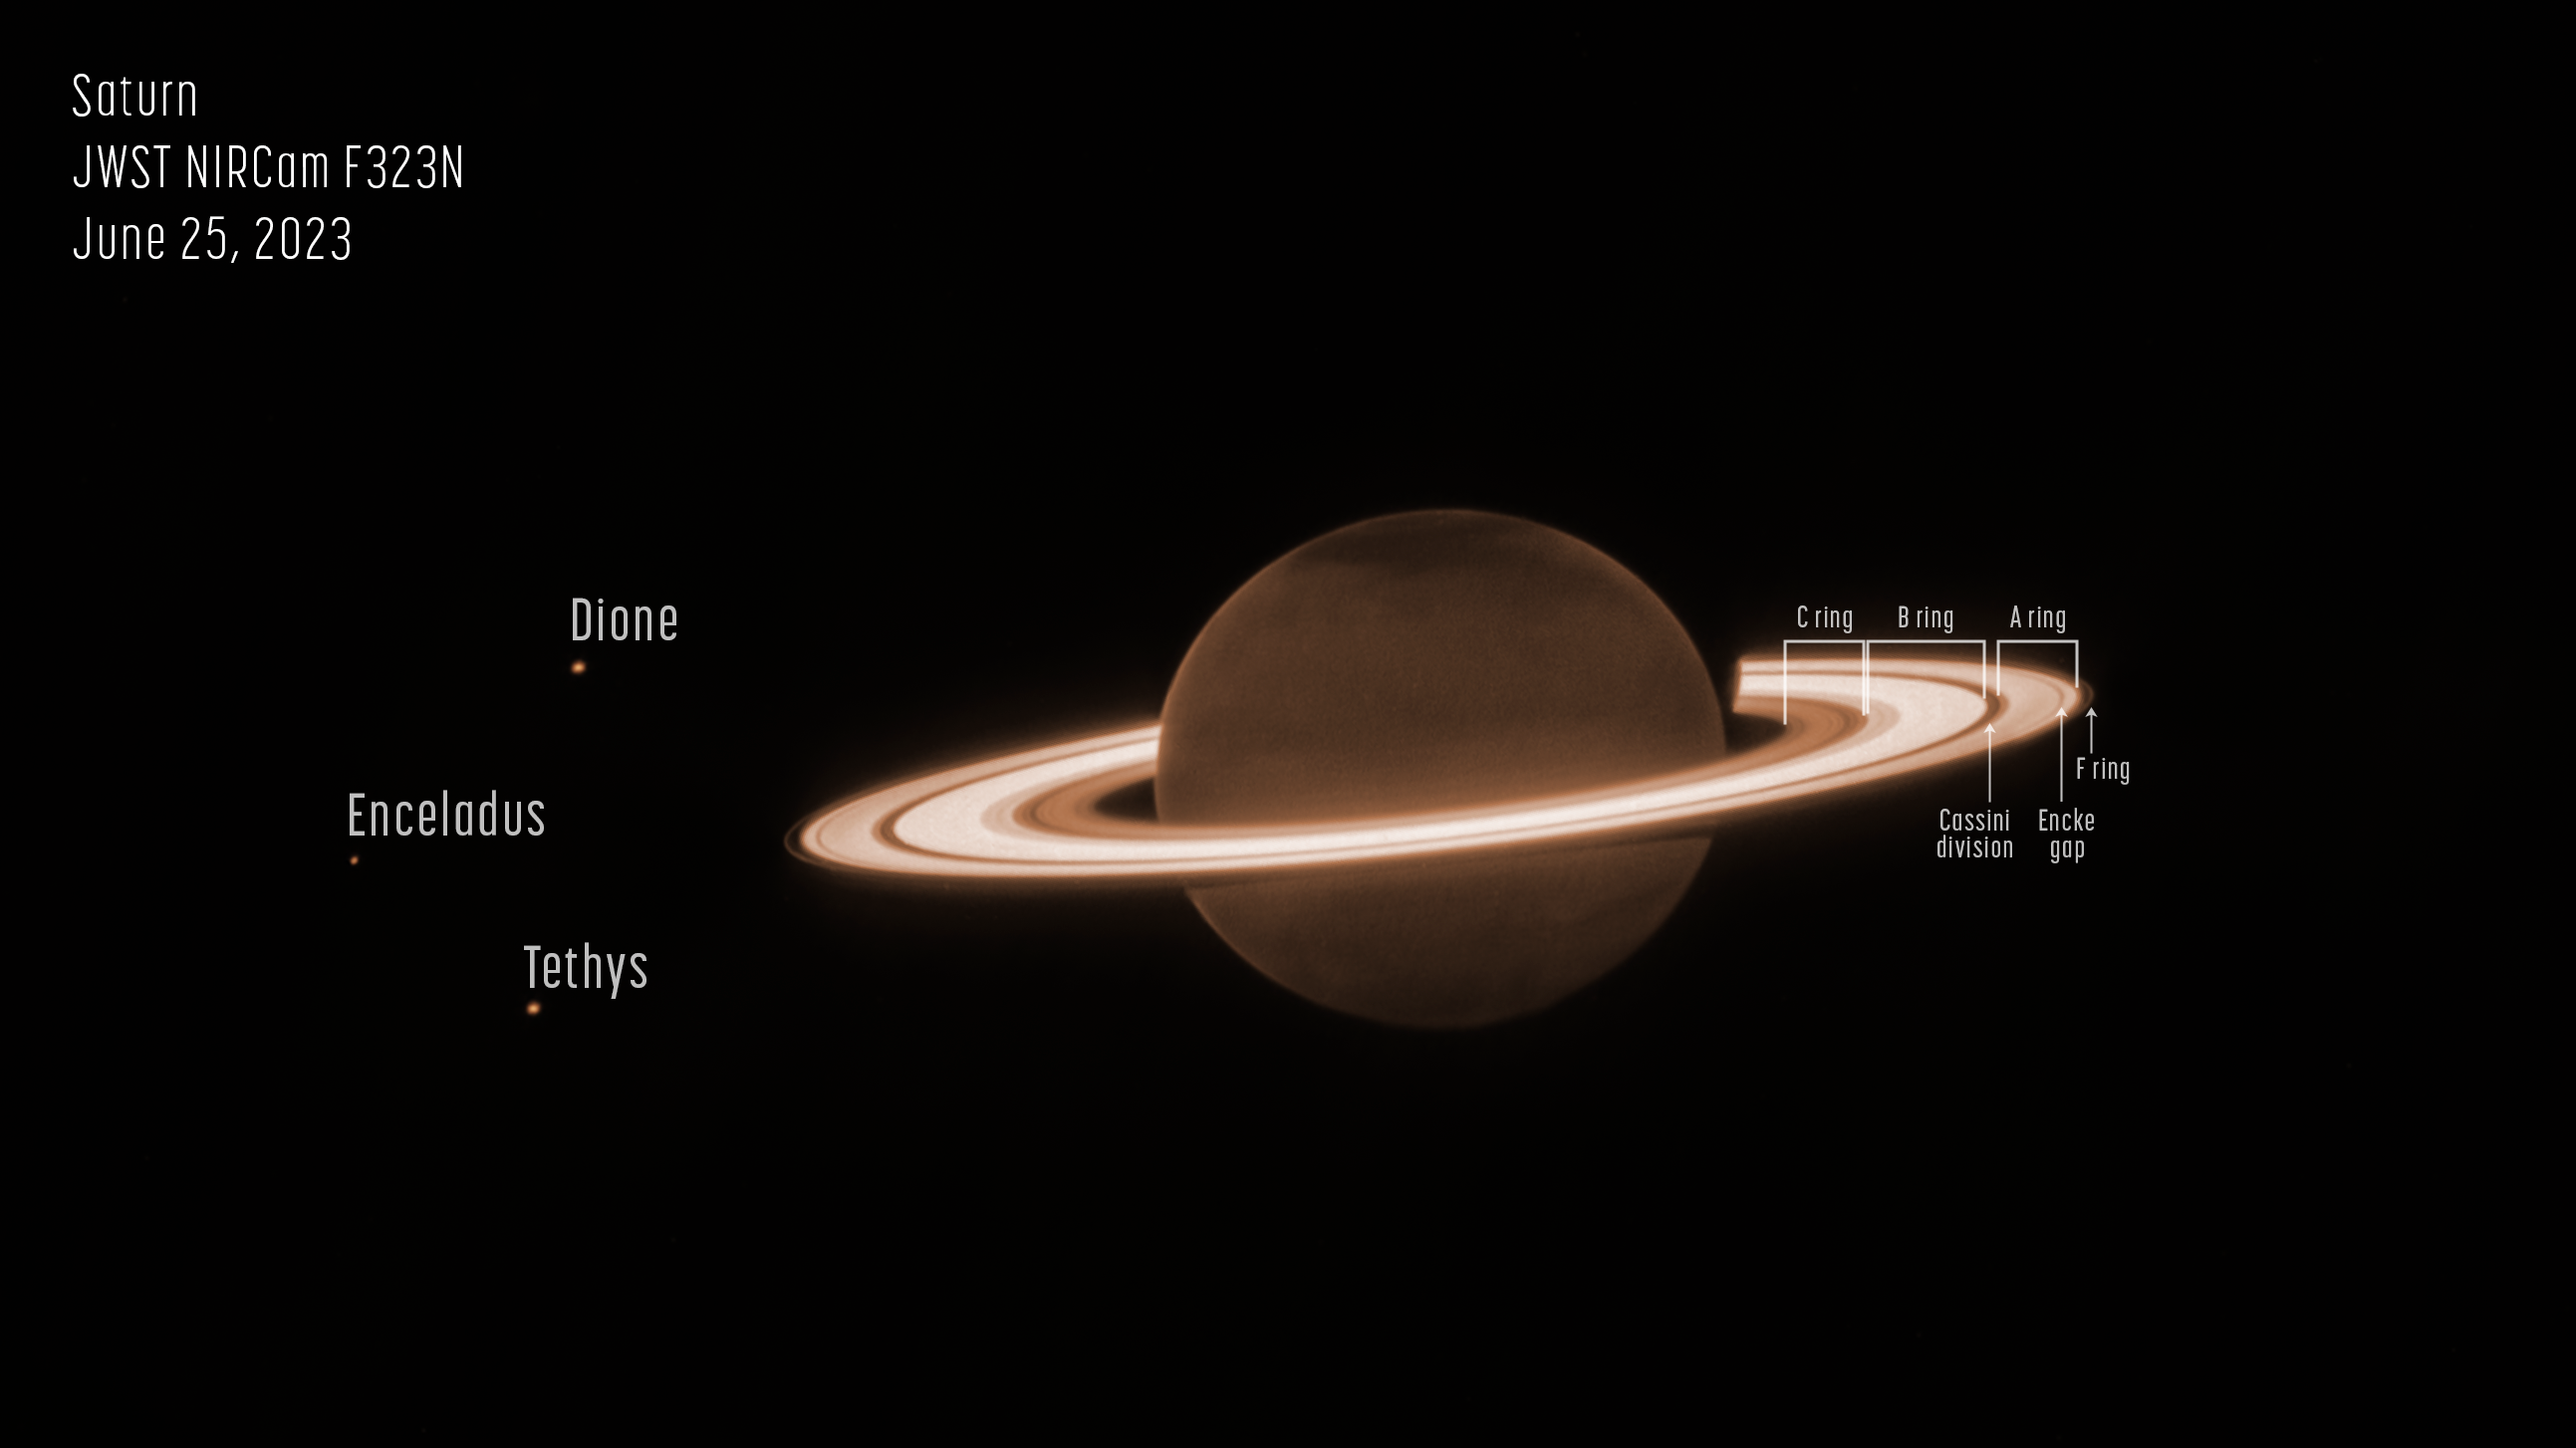

Saturn’s rings shine in Webb’s observations of ringed planet (annotated)

On 25 June 2023, the NASA/ESA/CSA James Webb Space Telescope turned to famed ringed world Saturn for its first near-infrared observations of the planet. The initial imagery from Webb’s NIRCam (Near-Infrared Camera) is already fascinating researchers.

Saturn itself appears extremely dark at this infrared wavelength observed by the telescope, as methane gas absorbs almost all of the sunlight falling on the atmosphere. However, the icy rings stay relatively bright, leading to the unusual appearance of Saturn in the Webb image.

This image was taken as part of Webb Guaranteed Time Observation program 1247. The program included several very deep exposures of Saturn, which were designed to test the telescope’s capacity to detect faint moons around the planet and its bright rings. Details in the orbital characteristics of newly discovered moons could help scientists put together a more complete picture of the current system of Saturn, as well as its past.

This new image of Saturn clearly shows details within the planet’s ring system, along with several of the planet’s moons – Dione, Enceladus, and Tethys. Additional deeper exposures (not shown here) will allow the team to probe some of the planet’s fainter rings, not visible in this image, including the thin G ring and the diffuse E ring. Saturn’s rings are made up of an array of rocky and icy fragments – the particles range in size from smaller than a grain of sand to a few as large as mountains on Earth. Researchers recently used Webb to explore Enceladus, and found a large plume jetting from the southern pole of the moon that contains both particles and plentiful amounts of water vapor – this plume feeds Saturn’s E ring.

Saturn’s atmosphere also shows surprising and unexpected detail. This is the first time that the planet’s atmosphere has been seen with such clarity at this particular wavelength (3.23 microns). The large, dark, diffuse structures in the northern hemisphere do not follow the planet’s lines of latitude, so this image is lacking the familiar striped appearance that is typically seen from Saturn’s deeper atmospheric layers. The patchiness is reminiscent of large-scale planetary waves in the stratospheric aerosols high above the main clouds, potentially similar to those seen in early Webb NIRCam observations of Jupiter.

When comparing the northern and southern poles of the planet in this image, the differences in appearance are typical with known seasonal changes on Saturn. For example, Saturn is currently experiencing northern summertime, with the southern hemisphere emerging from the darkness at the end of a winter. However, the northern pole is particularly dark, perhaps due to an unknown seasonal process affecting polar aerosols in particular. A tiny hint of brightening towards the edge of Saturn’s disk might be due to high-altitude methane fluorescence (the process of emitting light after absorbing light), emission from the trihydrogen ion (H3+) in the ionosphere, or both; spectroscopy from Webb could help confirm this.

Missions like NASA’s Pioneer 11, Voyagers 1 and 2, the Cassini spacecraft, and the NASA/ESA Hubble Space Telescope have tracked Saturn’s atmosphere and rings for many decades. These observations from Webb are just a hint at what this observatory will add to Saturn’s story in the coming years as the science team delves deep into the data to prepare peer-reviewed results.

Note: This content highlights data from Webb science in progress, which has not yet been through the peer-review process.

Credit: NASA, ESA, CSA, STScI, M. Tiscareno (SETI Institute), M. Hedman (University of Idaho), M. El Moutamid (Cornell University), M. Showalter (SETI Institute), L. Fletcher (University of Leicester), H. Hammel (AURA), J. DePasquale (STScI)